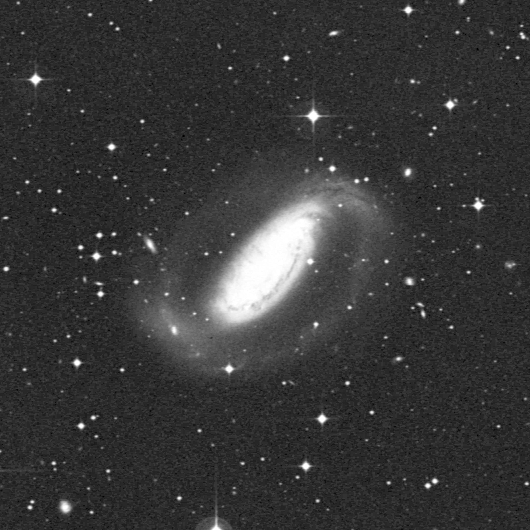

Starburst galaxy NGC 1808

The ground-based image shows that the galaxy has an unusual, warped shape. Most spiral galaxies are flat disks, but this one has curls of dust and gas at its outer spiral arms (upper right-hand corner and lower left-hand corner). This peculiar shape is evidence that NGC 1808 may have had a close interaction with another nearby galaxy, NGC 1792, which is not in the picture Such an interaction could have hurled gas towards the nucleus of NGC 1808, triggering the exceptionally high rate of star birth seen in the WFPC2 inset image.

Credit: Jim Flood, an amateur astronomer affiliated with Sperry Observatory at Union College in New Jersey, and Max Mutchler, a member of the Space Telescope Science Institute staff who volunteered to work with Jim